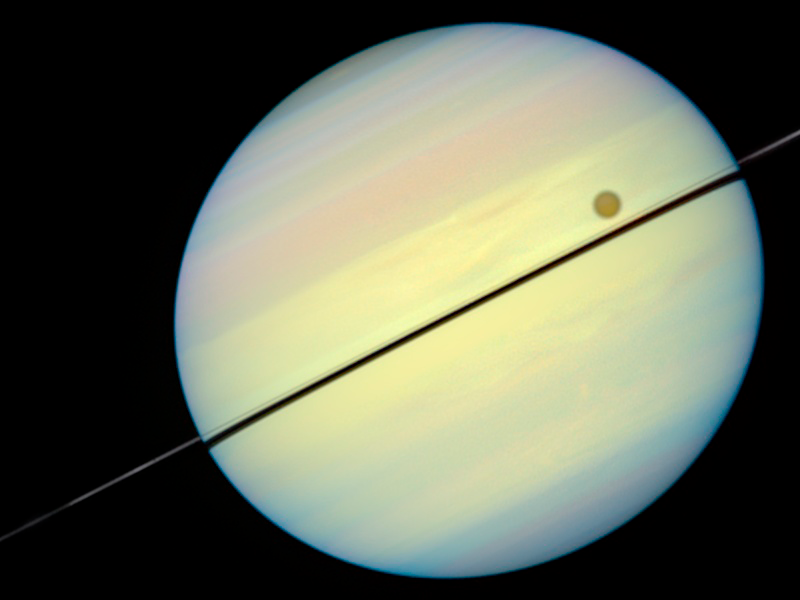

Hubble Catches Titan Chasing Its Shadow - Frame 6

This movie still shows Titan chasing its shadow across Saturn's disk. The still is from a movie created from images taken by NASA/ESA Hubble Space Telescope. It reveals the planet's rings tilted nearly edge-on toward the Earth, an event that occurs once every 15 years.

Credit: NASA/ESA and E. Karkoschka (University of Arizona)